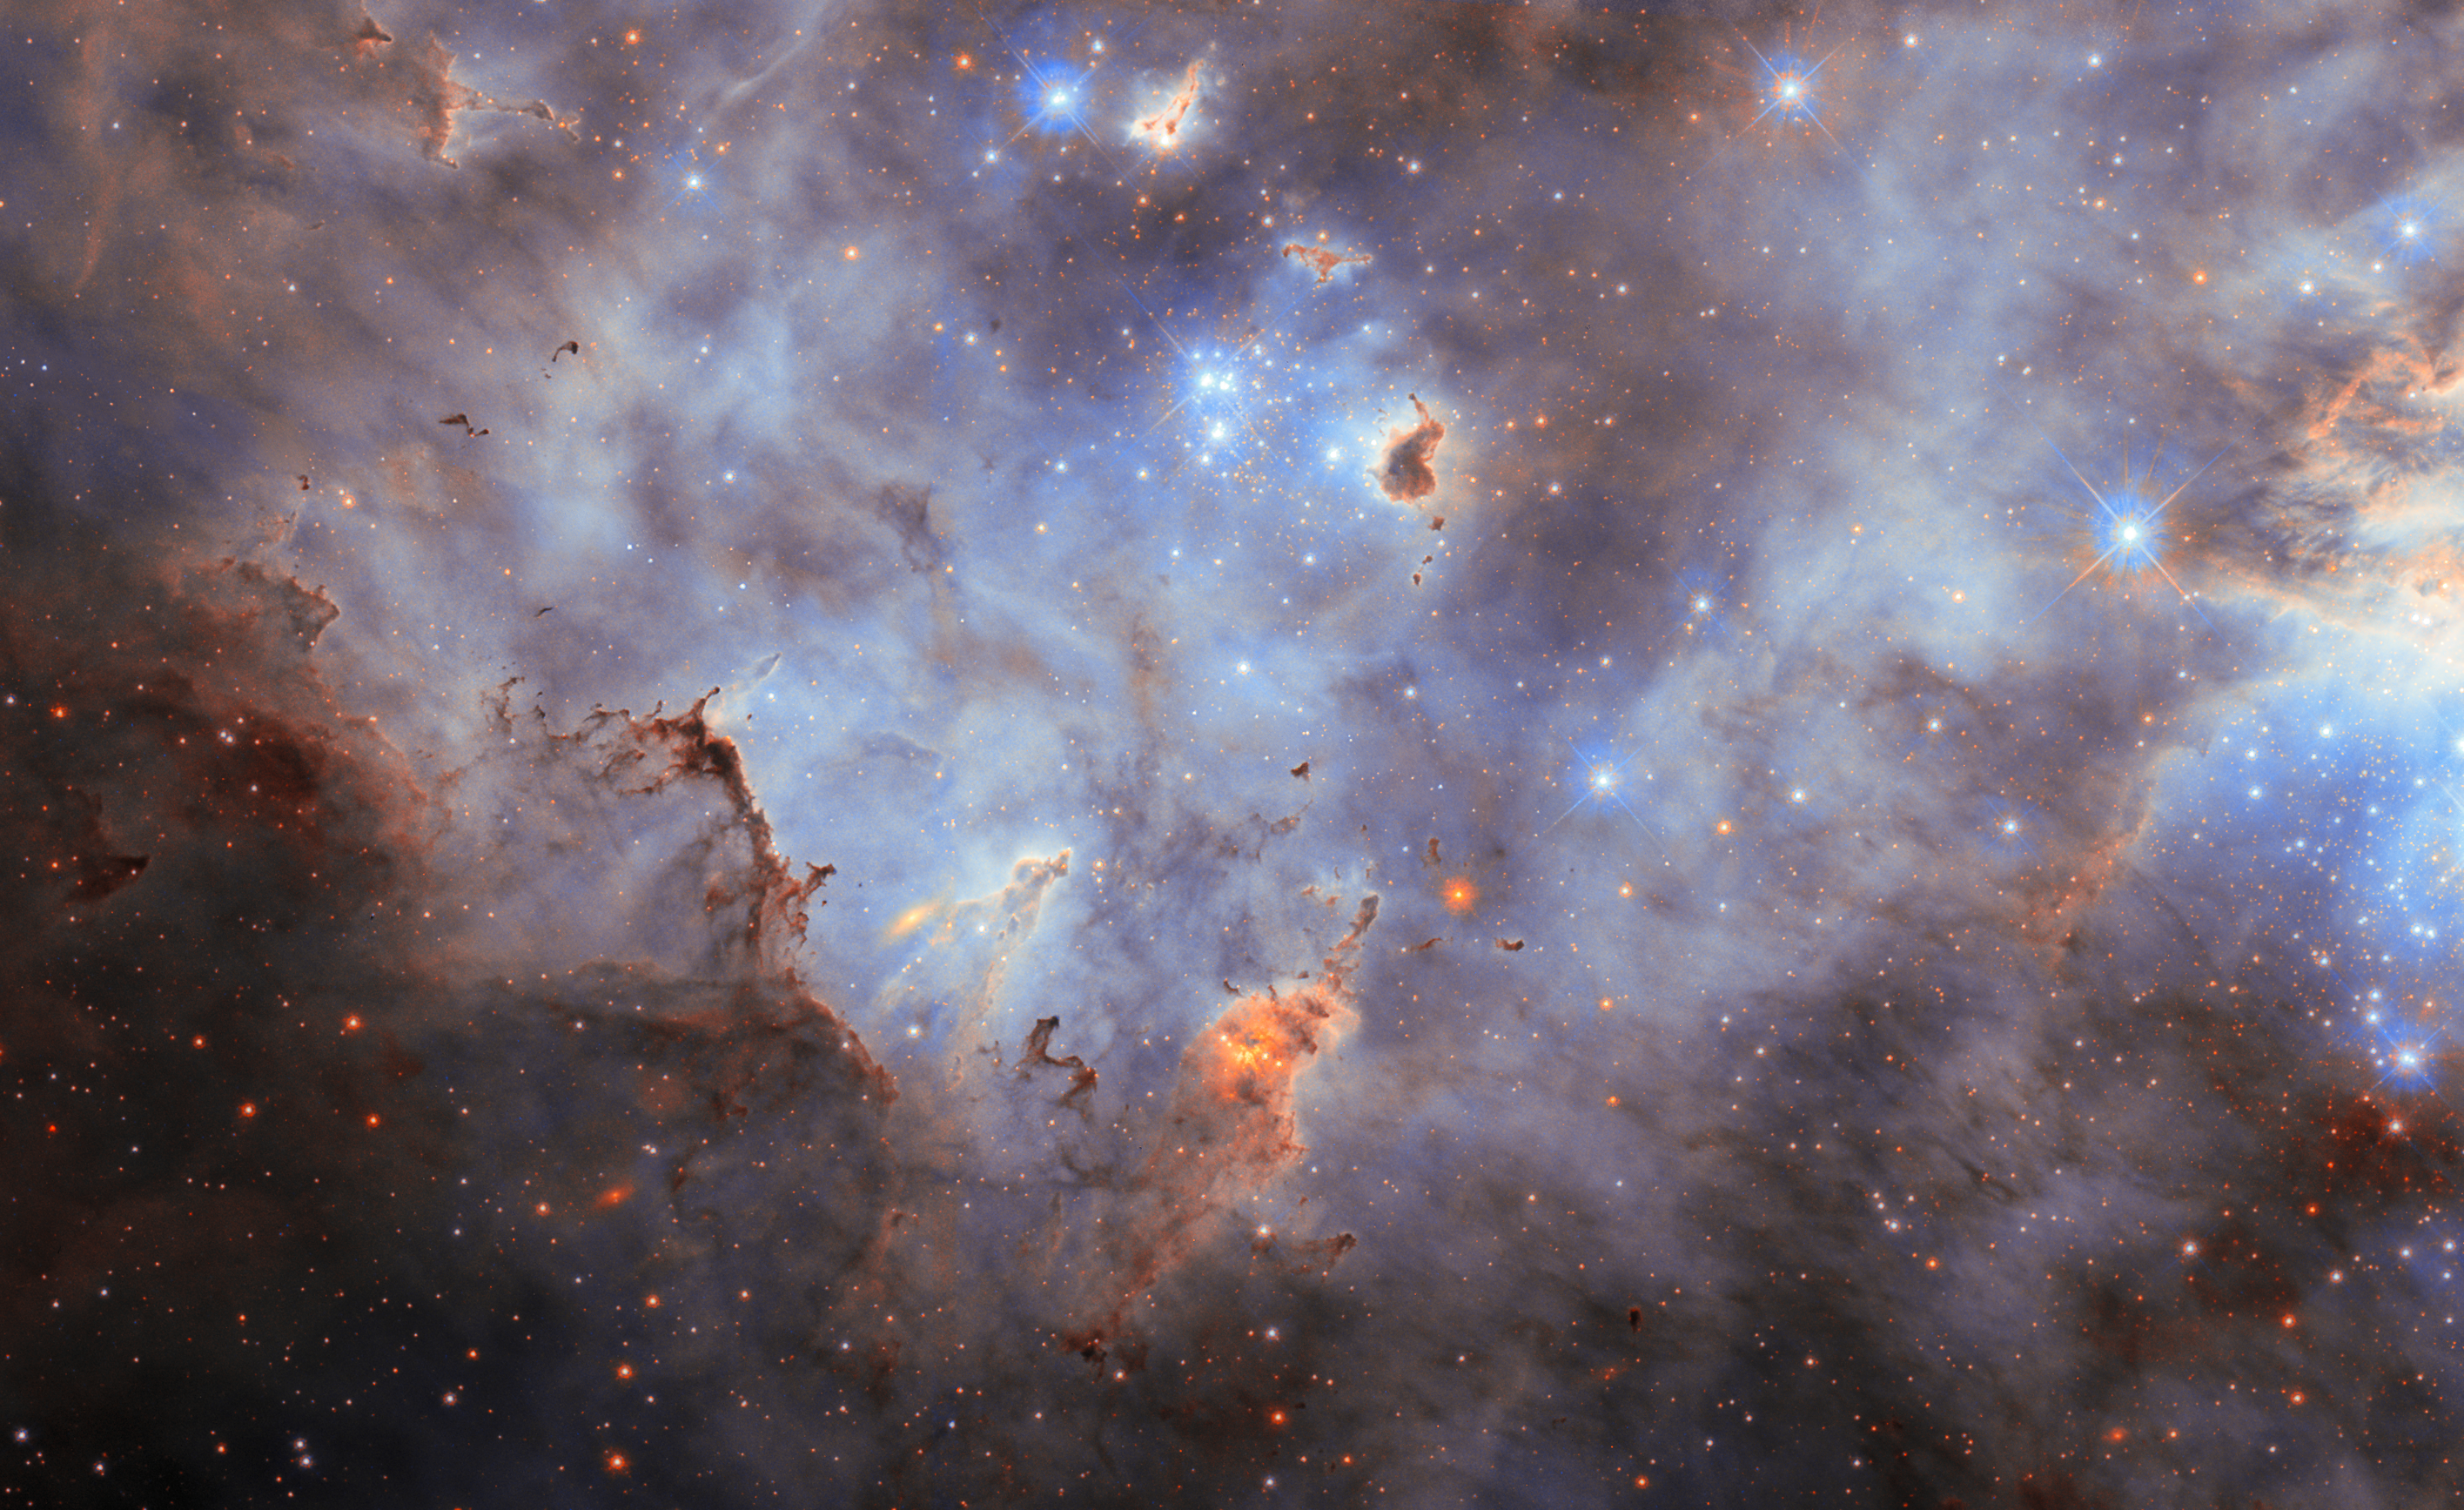

Cloudy cluster

This new NASA/ESA Hubble Space Telescope Picture of the Week features a cloudy starscape from an impressive star cluster. This scene is located in the Large Magellanic Cloud, a dwarf galaxy situated about 160 000 light-years away in the constellations Dorado and Mensa. With a mass equal to 10–20% of the mass of the Milky Way, the Large Magellanic Cloud is the largest of the dozens of small galaxies that orbit our galaxy.

The Large Magellanic Cloud is home to several massive stellar nurseries where gas clouds, like those strewn across this image, coalesce into new stars. Today’s image depicts a portion of the galaxy’s second-largest star-forming region, which is called N11. (The most massive and prolific star-forming region in the Large Magellanic Cloud, the Tarantula Nebula, is a frequent target for Hubble.) We see bright, young stars lighting up the gas clouds and sculpting clumps of dust with powerful ultraviolet radiation.

This image marries observations made roughly 20 years apart, a testament to Hubble’s longevity. The first set of observations, which were carried out in 2002–2003, capitalised on the exquisite sensitivity and resolution of the then-newly-installed Advanced Camera for Surveys. Astronomers turned Hubble toward the N11 star cluster to do something that had never been done before at the time: catalogue all the stars in a young cluster with masses between 10% of the Sun’s mass and 100 times the Sun’s mass.

The second set of observations came from Hubble’s newest camera, the Wide Field Camera 3. These images focused on the dusty clouds that suffuse the cluster, bringing a new perspective on cosmic dust.

Credit: ESA/Hubble & NASA, C. Murray, J. Maíz Apellániz